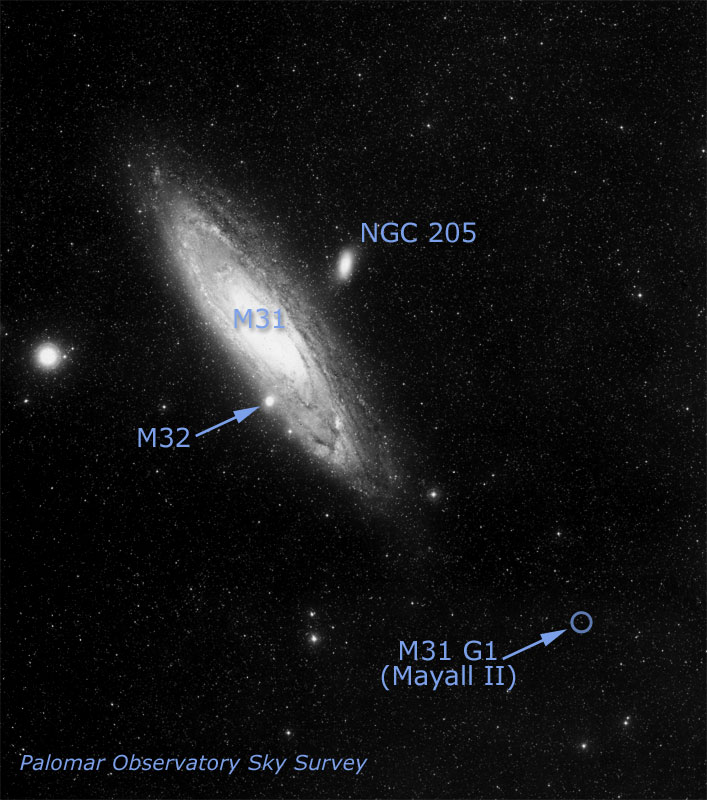

Location of Globular Cluster G1 in Galaxy M31

Medium-size black holes actually do exist, according to the latest findings from NASA/ESA Hubble Space Telescope, but scientists had to look in some unexpected places to find them. The previously undiscovered black holes provide an important link that sheds light on the way in which black holes grow. Even more odd, these new black holes were found in the cores of glittering, 'beehive' swarms of stars called globular star clusters, which orbit our Milky Way and other galaxies. G1 harbors a black hole about 20, 000 times more massive than our Sun.

Credit: NASA/ESA and Z. Levay (STScI)